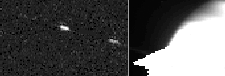

Saturn, S/1995 S3

Astronomers have announced the discovery of at least two, and possibly as many as four, new moons orbiting the giant planet Saturn. This discovery was based upon Hubble telescope images that were taken when Saturn's rings were tilted edge-on to Earth.

Credit: NASA & ESA